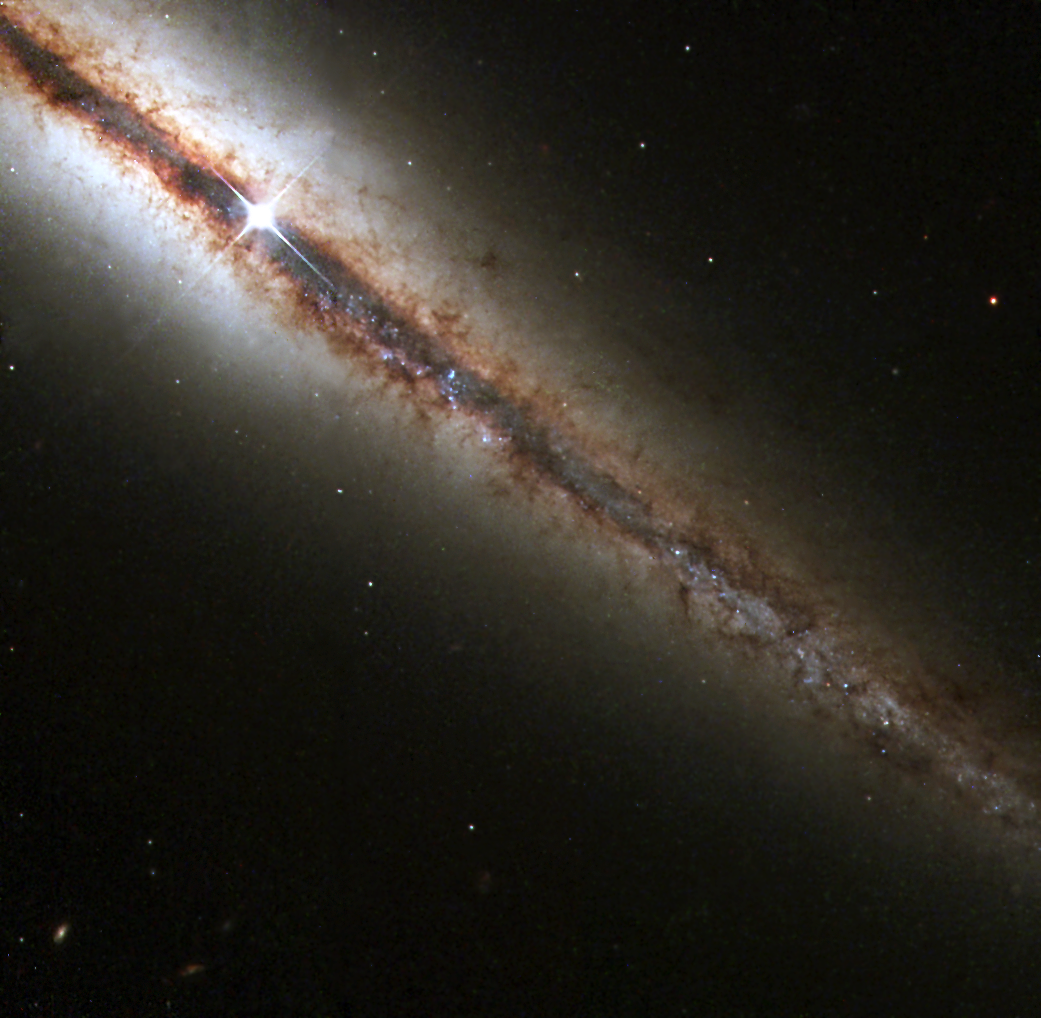

Edge-On view of NGC 4013

The Hubble telescope has snapped this remarkable view of a perfectly 'edge-on' galaxy, NGC 4013. This new Hubble picture reveals with exquisite detail huge clouds of dust and gas extending along, as well as far above, the galaxy's main disk. NGC 4013 is a spiral galaxy, similar to our Milky Way, lying some 55 million light-years from Earth in the direction of the constellation Ursa Major.

Viewed face-on, it would look like a nearly circular pinwheel, but NGC 4013 happens to be seen edge-on from our vantage point. Even at 55 million light-years, the galaxy is larger than Hubble's field of view, and the image shows only a little more than half of the object, albeit with unprecedented detail.

Credit: NASA/ESA and The Hubble Heritage Team STScI/AURA)